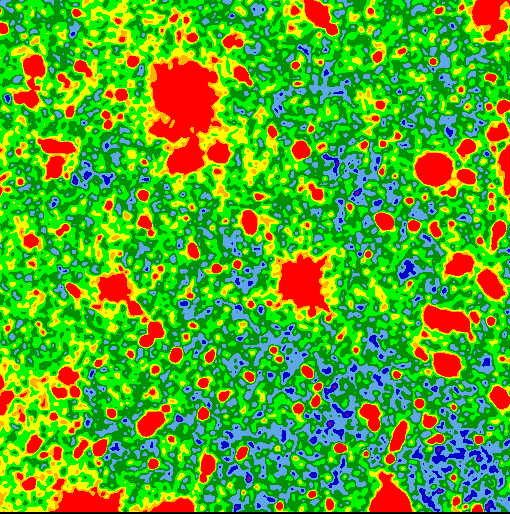

Hubble finds most of visible light in the Universe

A closer look at the Hubble Space Telescope's most detailed image, the Hubble Deep Field, reveals that the faint galaxies seen by Hubble could account for most of the visible light in the cosmos. "We appear close to completing a 'light census' of the universe,'' reports Michael S. Vogeley of the Princeton University Observatory. "The extraordinary smoothness of the background sky suggests that most of the visible light in the universe hails from galaxies that Hubble can detect.''

Credit: M. Vogeley (Princeton University Observatory) and NASA/ESA